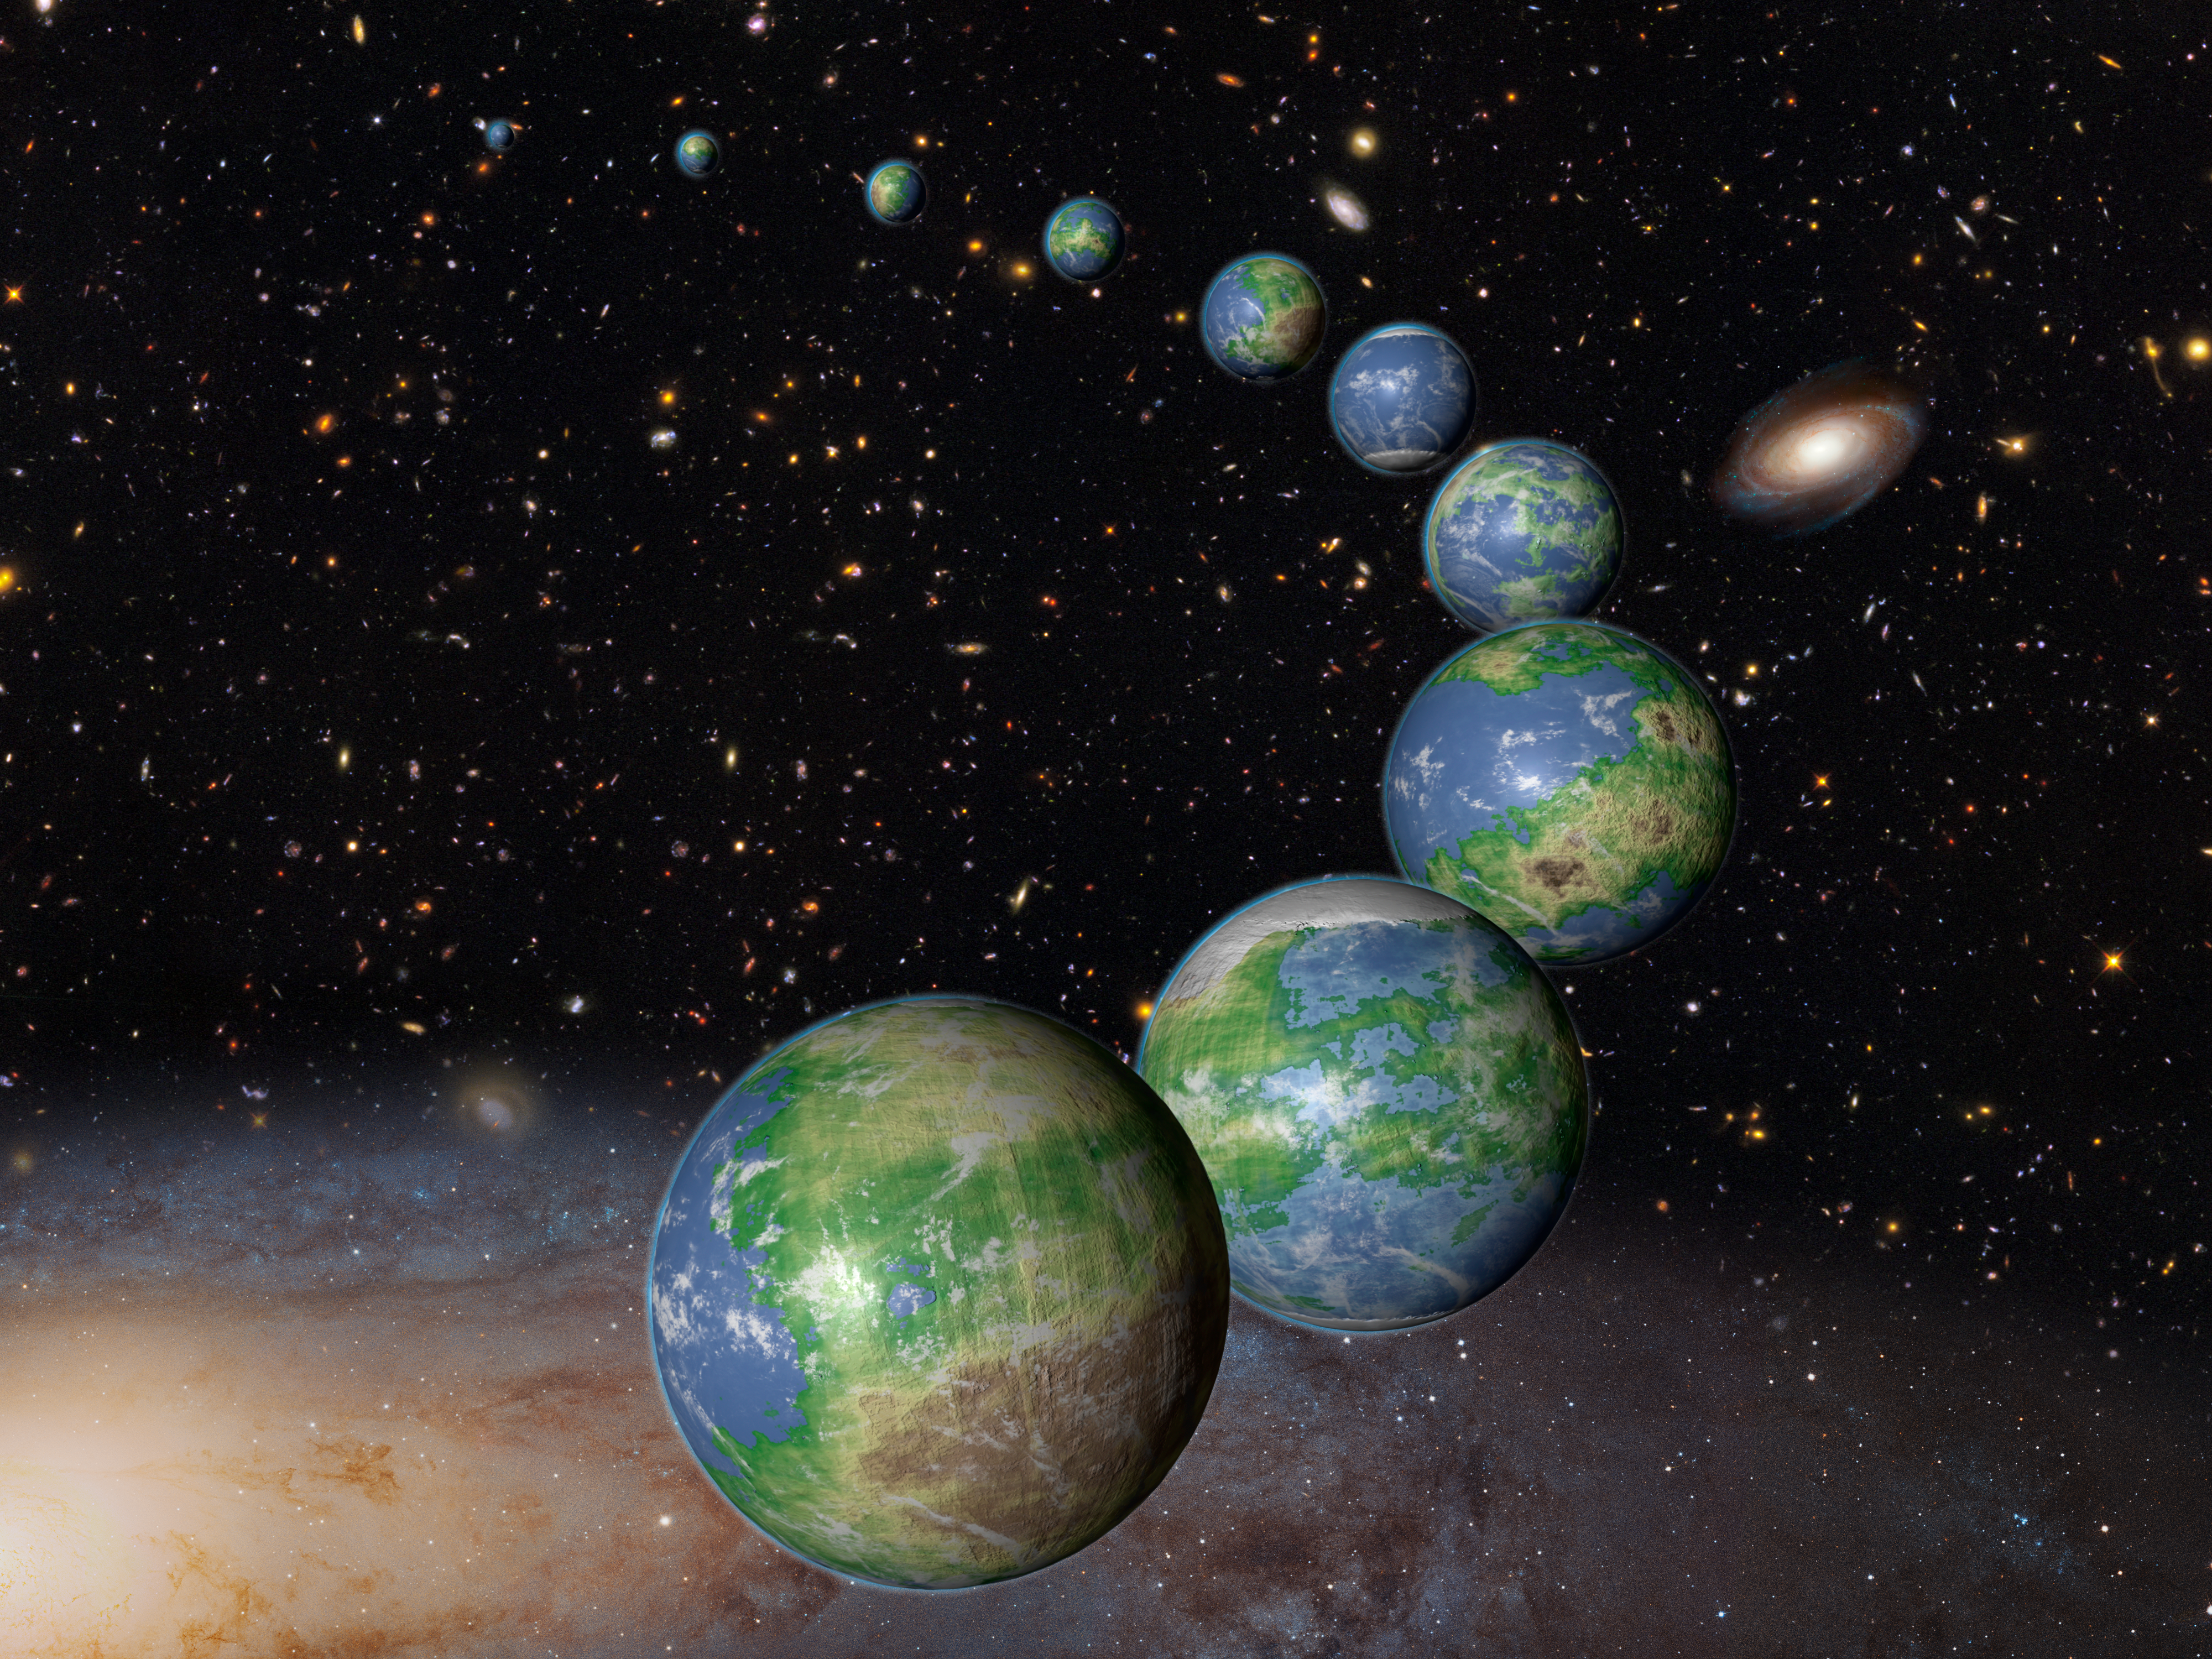

Artist's Concept of Earth-Like Planets in the Future Universe

This is an artist's impression of innumerable Earth-like planets that have yet to be born over the next trillion years in the evolving universe.

Credit: NASA, ESA, and G. Bacon (STScI)